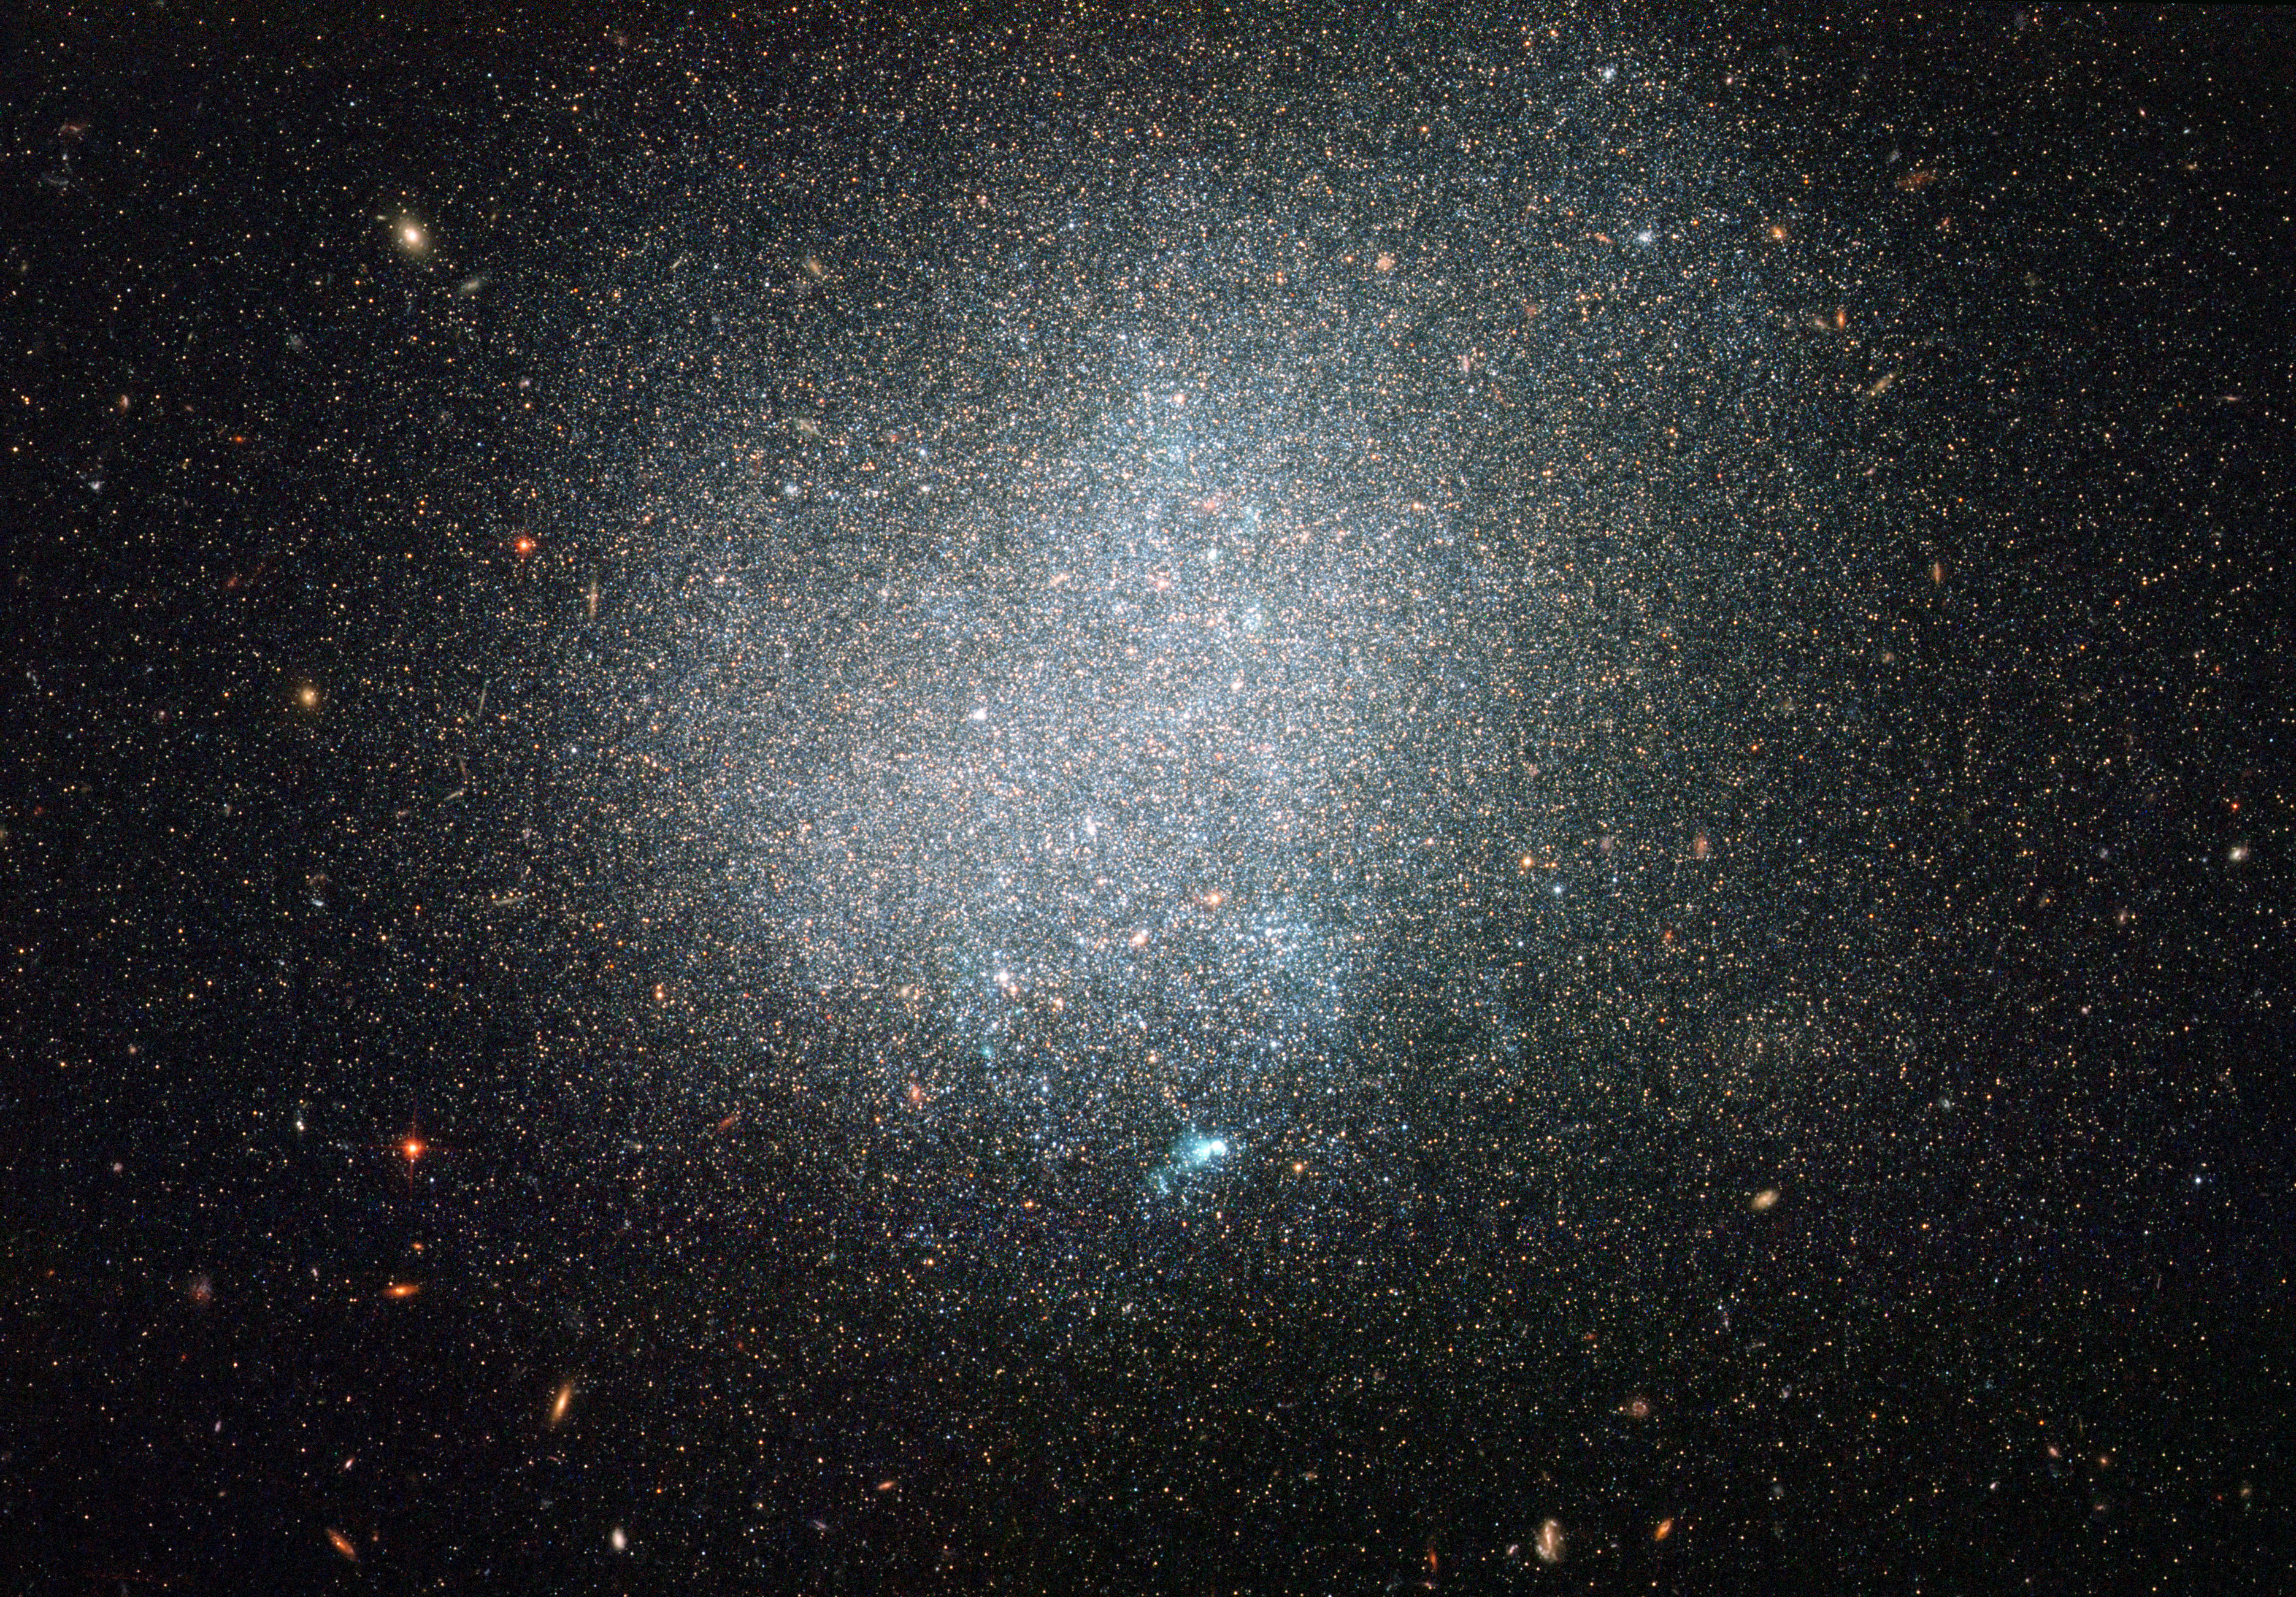

A lonely galactic island

In terms of intergalactic real estate, our Solar System has a plumb location as part of a big, spiral galaxy, the Milky Way. Numerous, less glamorous dwarf galaxies, keep the Milky Way company. Many galaxies, however, are comparatively isolated, without close neighbours. One such example is the small galaxy known as DDO 190, snapped here in a new image from the NASA/ESA Hubble Space Telescope.

DDO 190 is classified as a dwarf irregular galaxy as it is relatively small and lacks clear structure. Older, reddish stars mostly populate DDO 190’s outskirts, while some younger, bluish stars gleam in DDO 190’s more crowded interior. Some pockets of ionised gas heated up by stars appear here and there, with the most noticeable one shining towards the bottom of DDO 190 in this picture. Meanwhile, a great number of distant galaxies with evident spiral, elliptical and less-defined shapes glow in the background.

DDO 190 lies around nine million light-years away from our Solar System. It is considered part of the loosely associated Messier 94 group of galaxies, not far from the Local Group of galaxies that includes the Milky Way. Canadian astronomer Sidney van der Bergh was the first to record DDO 190 in 1959 as part of the DDO catalogue of dwarf galaxies. (“DDO” stands for the David Dunlap Observatory, now managed by the Royal Astronomical Society of Canada, where the catalogue was created).

Although within the Messier 94 group, DDO 190 is on its own. The galaxy’s nearest dwarf galaxy neighbour, DDO 187, is thought to be no closer than three million light-years away. In contrast, many of the Milky Way’s companion galaxies, such as the Large and Small Magellanic Clouds, reside within a fifth or so of that distance, and even the giant spiral of the Andromeda Galaxy is closer to the Milky Way than DDO 190 is to its nearest neighbour.

Hubble’s Advanced Camera for Surveys captured this image in visible and infrared light. The field of view is around 3.3 by 3.3 arcminutes

A version of this image was entered into the Hubble’s Hidden Treasures Image Processing Competition by contestant Claude Cornen. Hidden Treasures is an initiative to invite astronomy enthusiasts to search the Hubble archive for stunning images that have never been seen by the general public. The competition has now closed and the results will be published soon.

Credit: ESA/Hubble & NASA